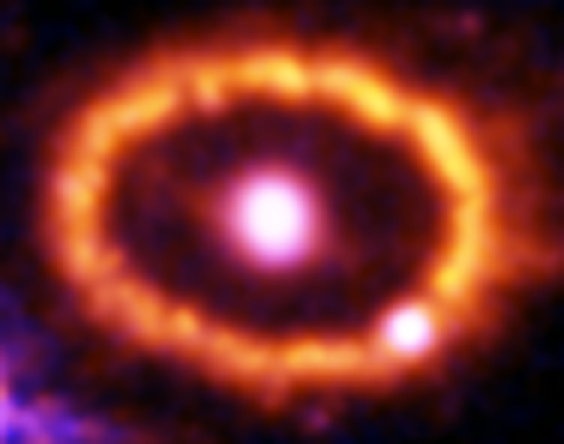

Hubble Supernova 1987A Scrapbook (1994-2003) - Image 1

in 1987, astronomers spotted the brightest stellar explosion ever seen since the one observed by Johannes Kepler over 400 years ago. Called SN 1987A, the titanic supernova explosion blazed with the power of 100,000,000 suns for several months following its discovery on Feb. 23 of that year. Although the supernova itself is over a million times fainter than when it was first discovered, a new light show in the space surrounding it is just beginning.

Credit: NASA/ESA, P. Challis, R. Kirshner (Harvard-Smithsonian Center for Astrophysics) and B. Sugerman (STScI)